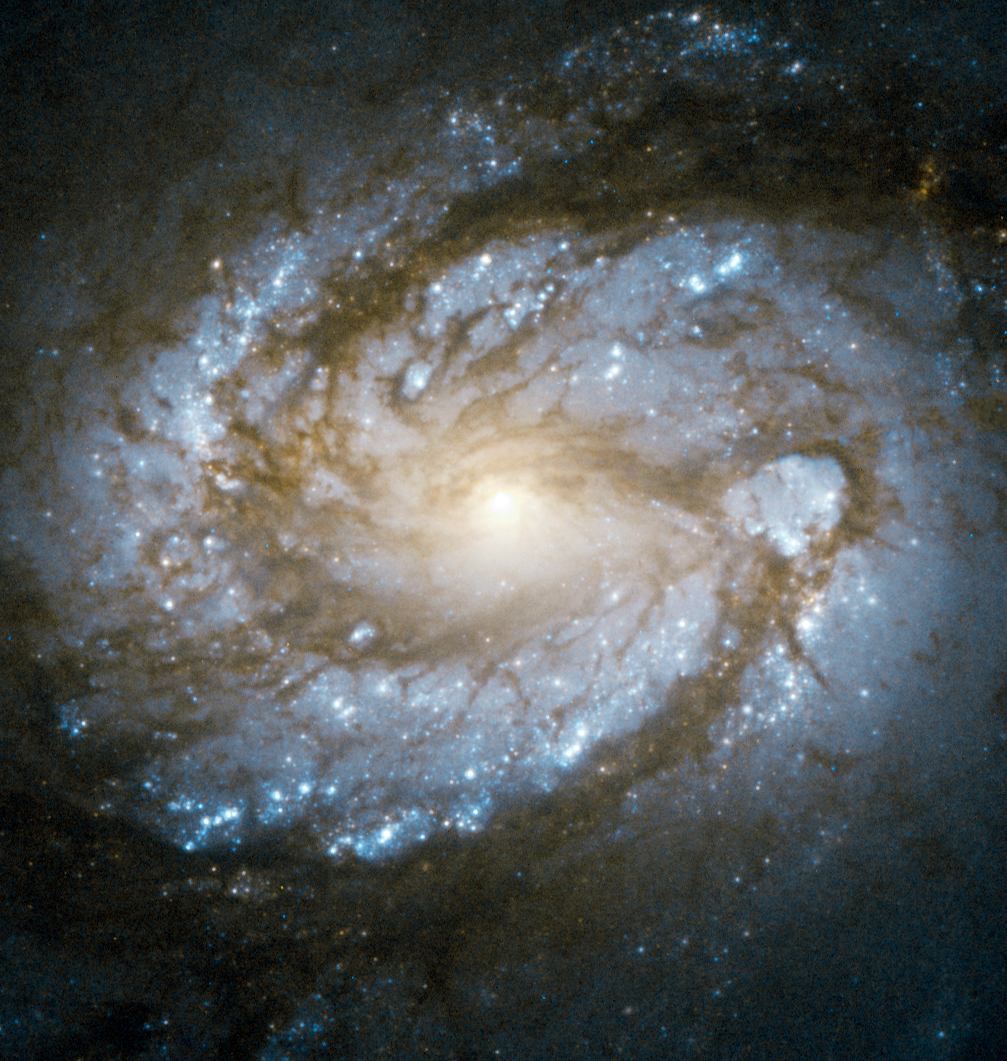

Core of Messier 100 in super high res

Messier 100 is a perfect example of a grand design spiral galaxy, a type of galaxy with prominent and very well-defined spiral arms. These dusty structures swirl around the galaxy’s nucleus, and are marked by a flurry of star formation activity that dots Messier 100 with bright blue, high-mass stars.

This image from the NASA/ESA Hubble Space Telescope, the most detailed made to date, shows the bright core of the galaxy and the innermost parts of its spiral arms. Messier 100 has an active galactic nucleus — a bright region at the galaxy’s core caused by a supermassive black hole that is actively swallowing material, which radiates brightly as it falls inwards.

The galaxy’s spiral arms also host smaller black holes, including the youngest ever observed in our cosmic neighbourhood, the result of a supernova observed in 1979.

Messier 100 is located in the direction of the constellation of Coma Berenices, about 50 million light-years distant.

The galaxy became famous in the early 1990s with the release of two images of the object taken with Hubble before and after a major repair to the telescope, which illustrated the dramatic improvement in Hubble’s observations.

This image, taken with the high resolution channel of Hubble’s Advanced Camera for Surveys demonstrates the continued evolution of Hubble’s capabilities over two decades in orbit. This image, like all high resolution channel images, has a relatively small field of view: only around 25 by 25 arcseconds.

Credit: ESA/Hubble & NASA